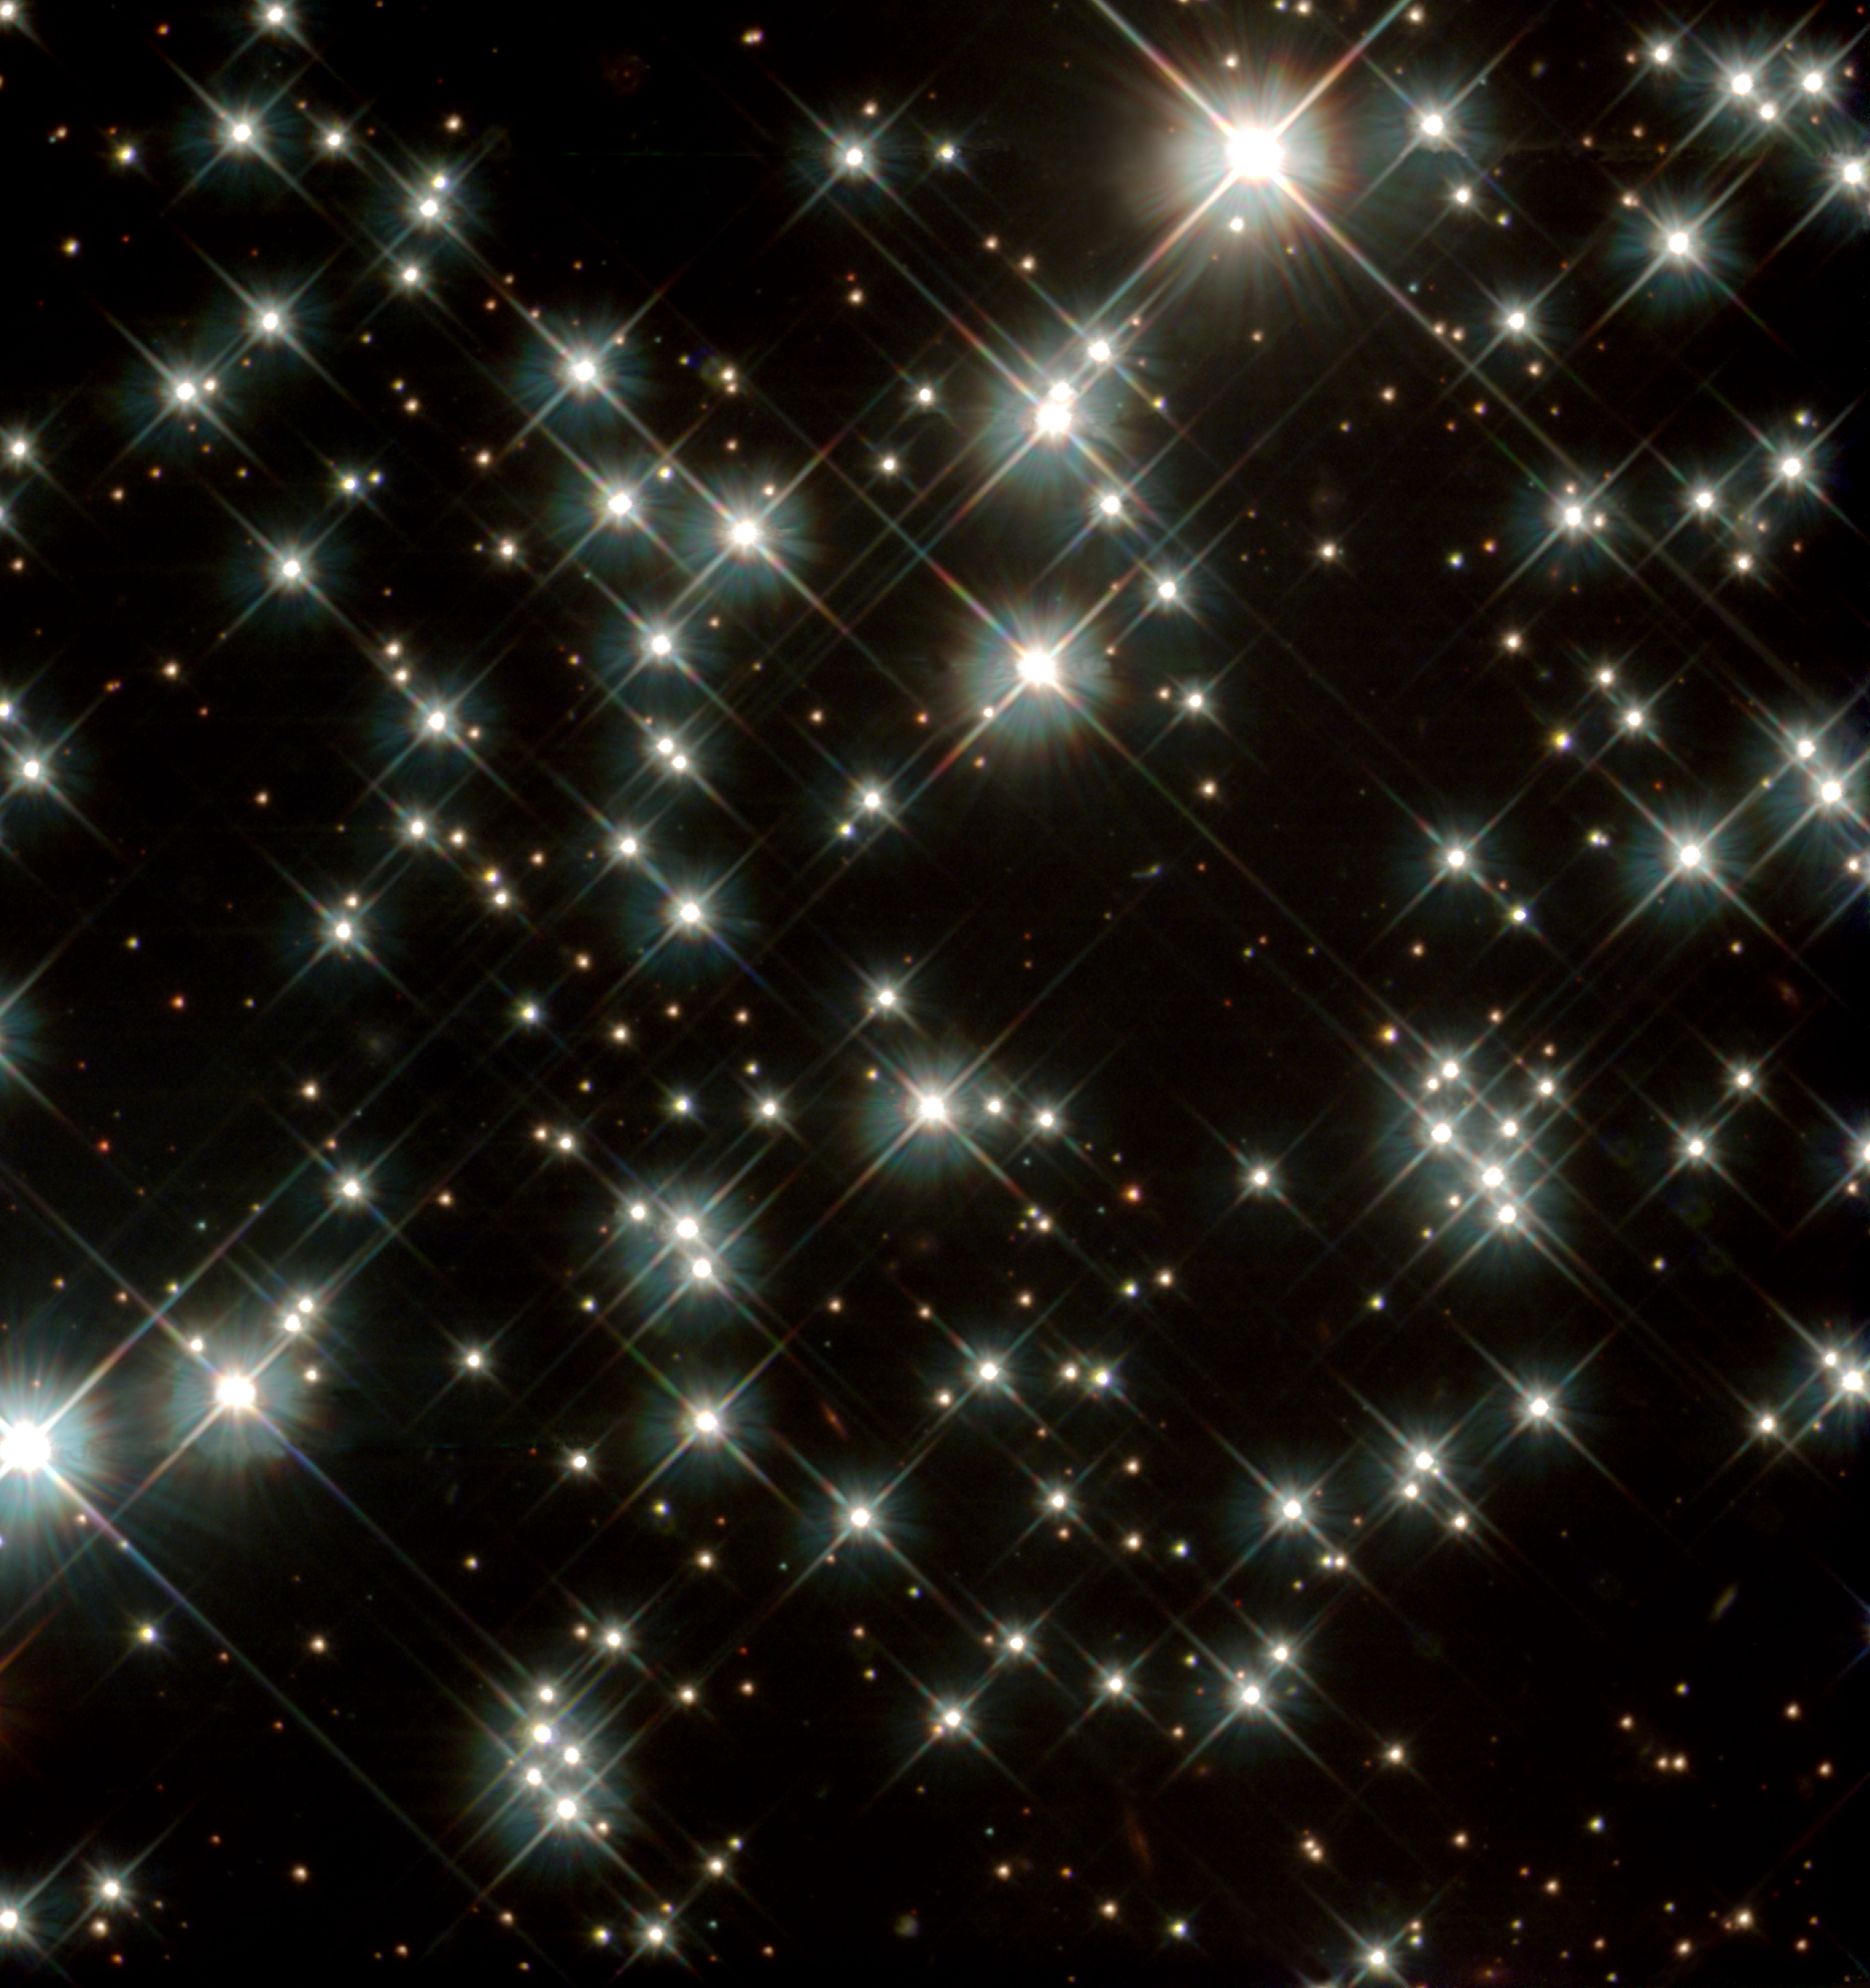

Globular Cluster M4

Peering deep inside a cluster of several hundred thousand stars, the NASA/ESA Hubble Space Telescope uncovered the oldest burned-out stars in our Milky Way Galaxy. Located in the globular cluster M4, these small, dying stars - called white dwarfs - are giving astronomers a fresh reading on one of the biggest questions in astronomy: How old is the universe? The ancient white dwarfs in M4 are about 12 to 13 billion years old. After accounting for the time it took the cluster to form after the big bang, astronomers found that the age of the white dwarfs agrees with previous estimates for the universe's age.

Credit: NASA/ESA and H. Richer